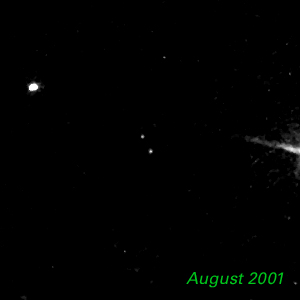

August 2001 - Kuiper Belt Object 1998 WW31

The Hubble Space Telescope is hot on the trail of a puzzling new class of solar system object that might be called a Pluto "mini-me." Together, these objects are 5,000 times less massive than Pluto and Charon. Like Pluto and Charon, these dim and fleeting objects travel in pairs in the frigid, mysterious outer realm of the solar system called the Kuiper Belt, a long-hypothesized "junkyard" of countless icy bodies left over from the solar system's formation. A total of seven binary Kuiper Belt objects have been seen so far by Hubble and ground-based observatories. Among them is a pair called 1998 WW31, which the Hubble telescope studied in detail.

Credit: NASA & ESA